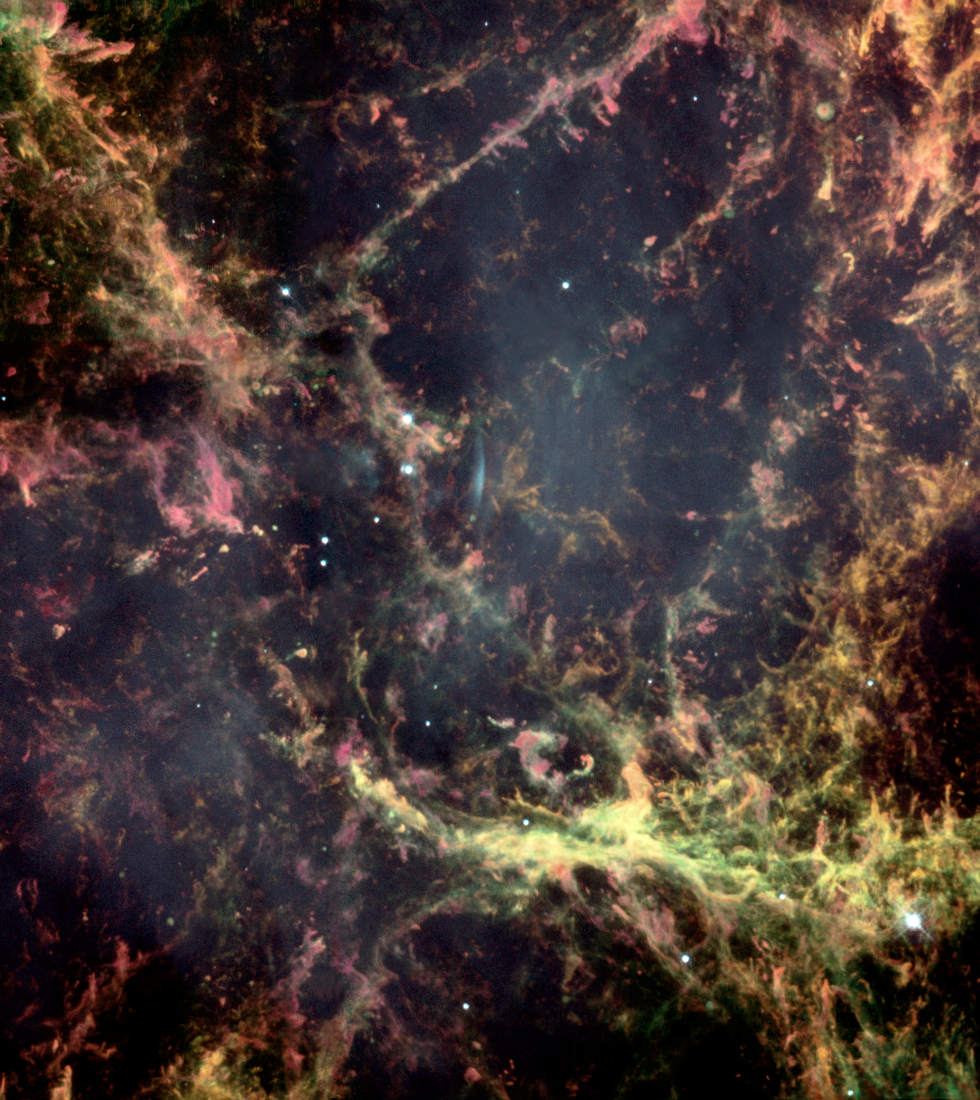

Peering into the heart of the Crab Nebula

In the year 1054 A.D., Chinese astronomers were startled by the appearance of a new star, so bright that it was visible in broad daylight for several weeks. Today, the Crab Nebula is visible at the site of that bright star.

Credit: NASA/ESA and The Hubble Heritage Team (STScI/AURA)